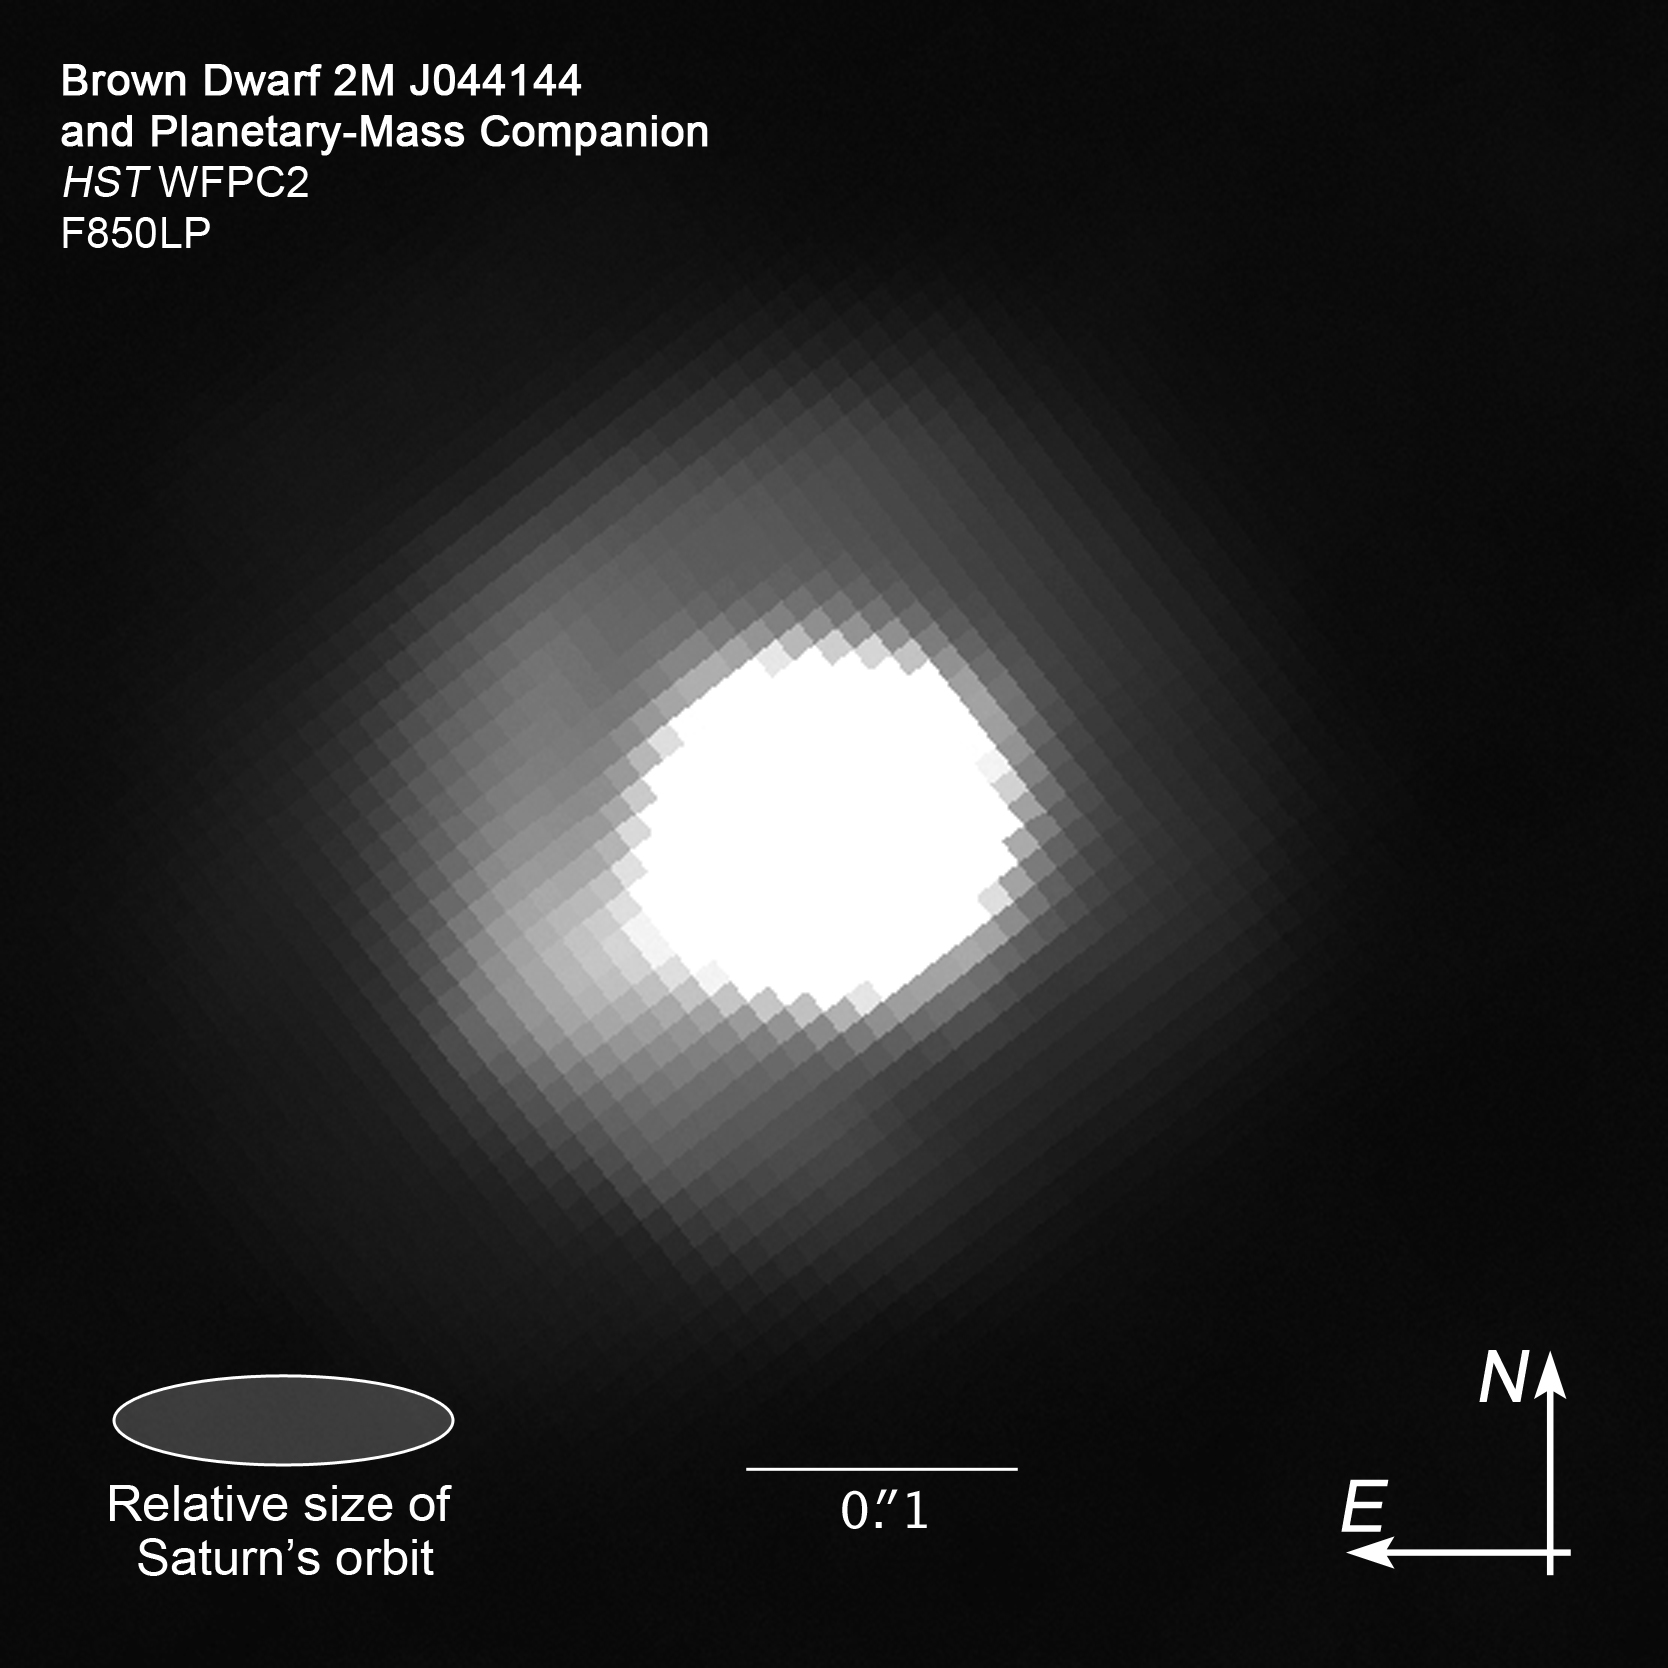

Compass and scale image of brown dwarf 2M J044144 with companion

Compass and scale image of brown dwarf 2M J044144 with companion. Image taken with Hubble's Wide Field Planetary Camera 2 on 10 August 2008.

Credit: NASA, ESA and Z. Levay (STScI)